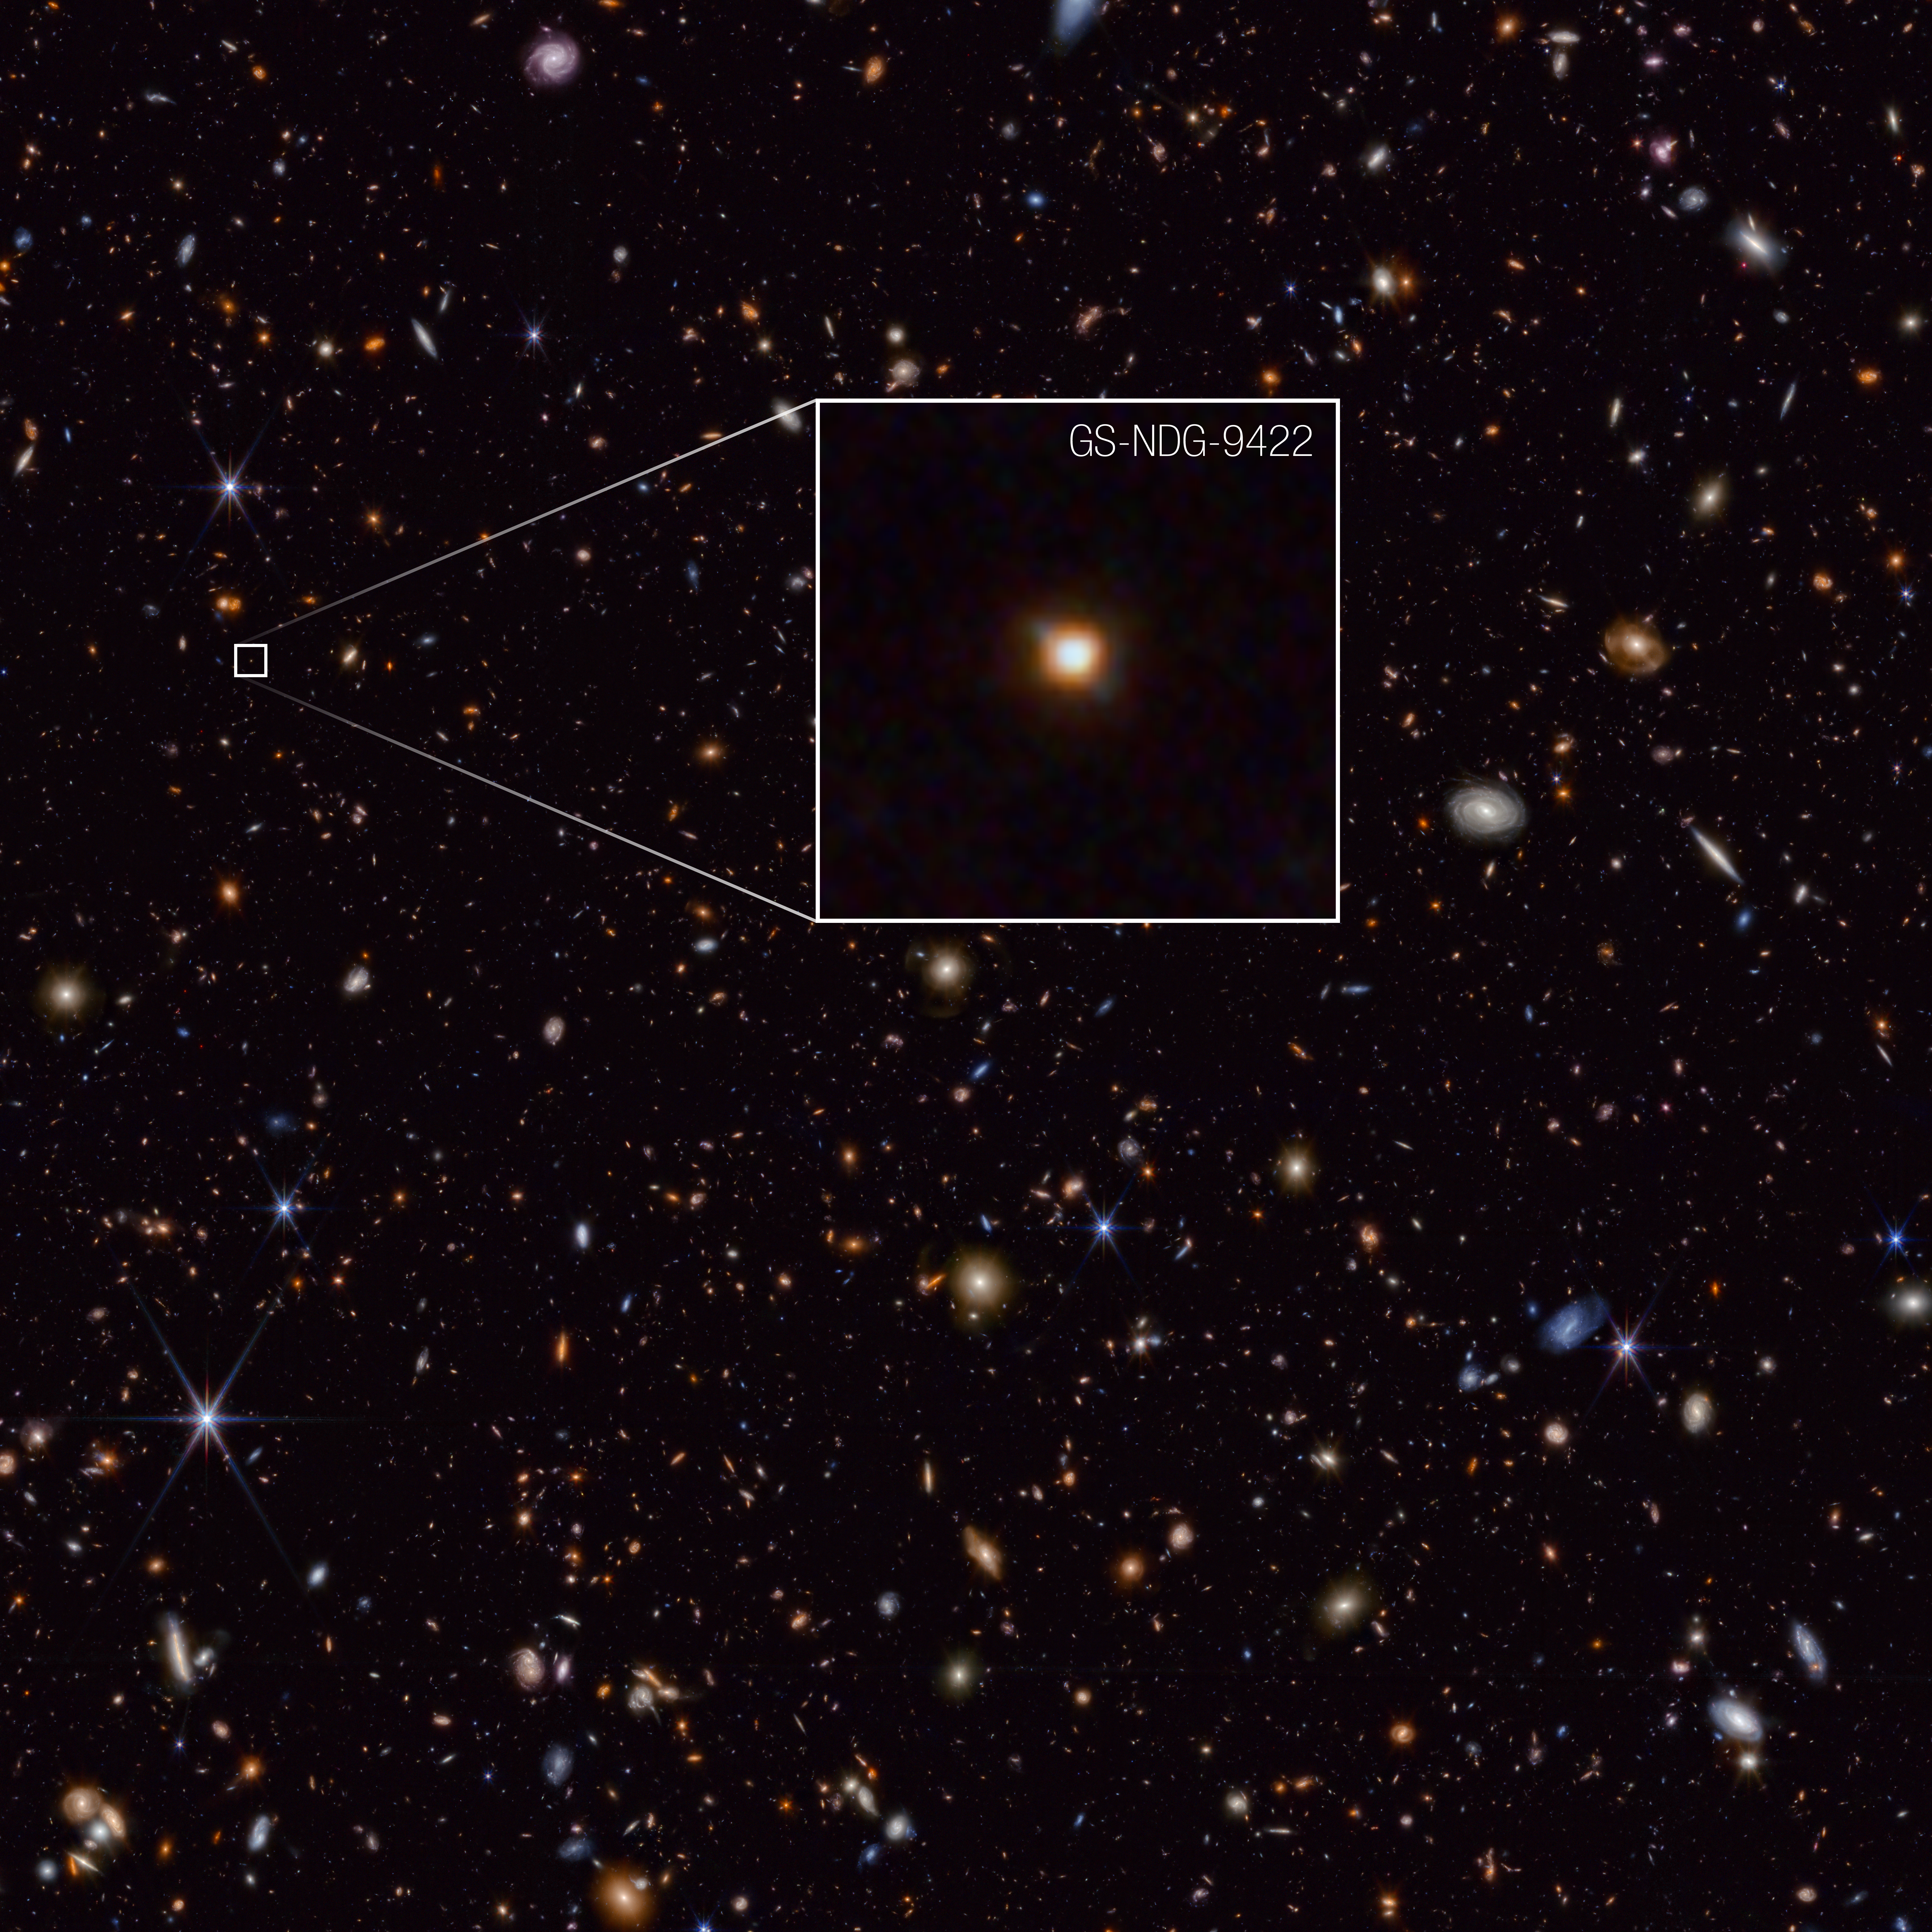

Galaxy GS-NDG-9422

The galaxy GS-NDG-9422 may easily have gone unnoticed. However, what appears as a faint blur in this James Webb Space Telescope image may actually be a groundbreaking discovery that points astronomers on a new path of understanding galaxy evolution in the early universe.

Detailed information on the galaxy’s chemical makeup, captured by Webb’s NIRSpec (Near-Infrared Spectrograph) instrument, indicates that the light we see in this image is coming from the galaxy’s hot gas, rather than its stars. That is the best explanation astronomers have discovered so far to explain the unexpected features in the light spectrum. They think that the galaxy’s stars are so extremely hot and massive that they are heating up the nebular gas in the galaxy to more than 80,000 degrees Celsius, allowing it to shine even brighter in near-infrared light than the stars themselves.

The authors of a new study on Webb’s observations of the galaxy think GS-NDG-9422 may represent a never-before-seen phase of galaxy evolution in the early universe, within the first billion years after the big bang. Their task now is to see if they can find more galaxies displaying the same features.

Credit: NASA, ESA, CSA, STScI, A. Cameron (University of Oxford)